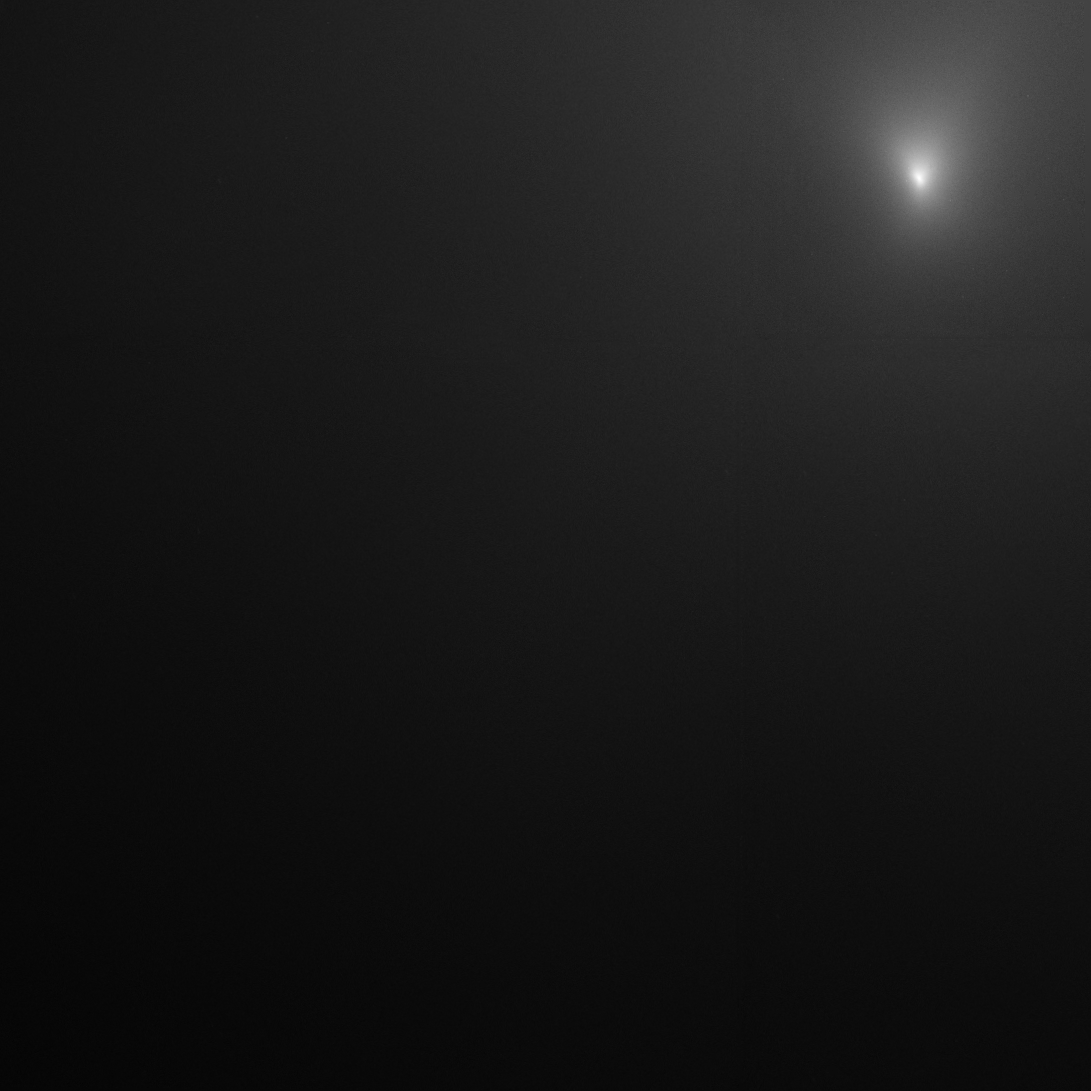

Comet 17P/Holmes Hubble image 3

This image taken by the NASA/ESA Hubble Space Telescope reveals Comet Holmes's bright core. It shows the coma, the cloud of dust and gas encircling the comet. The image was taken 4 Nov.

Credit: NASA,ESA, and H. Weaver (The Johns Hopkins University Applied Physics Laboratory)